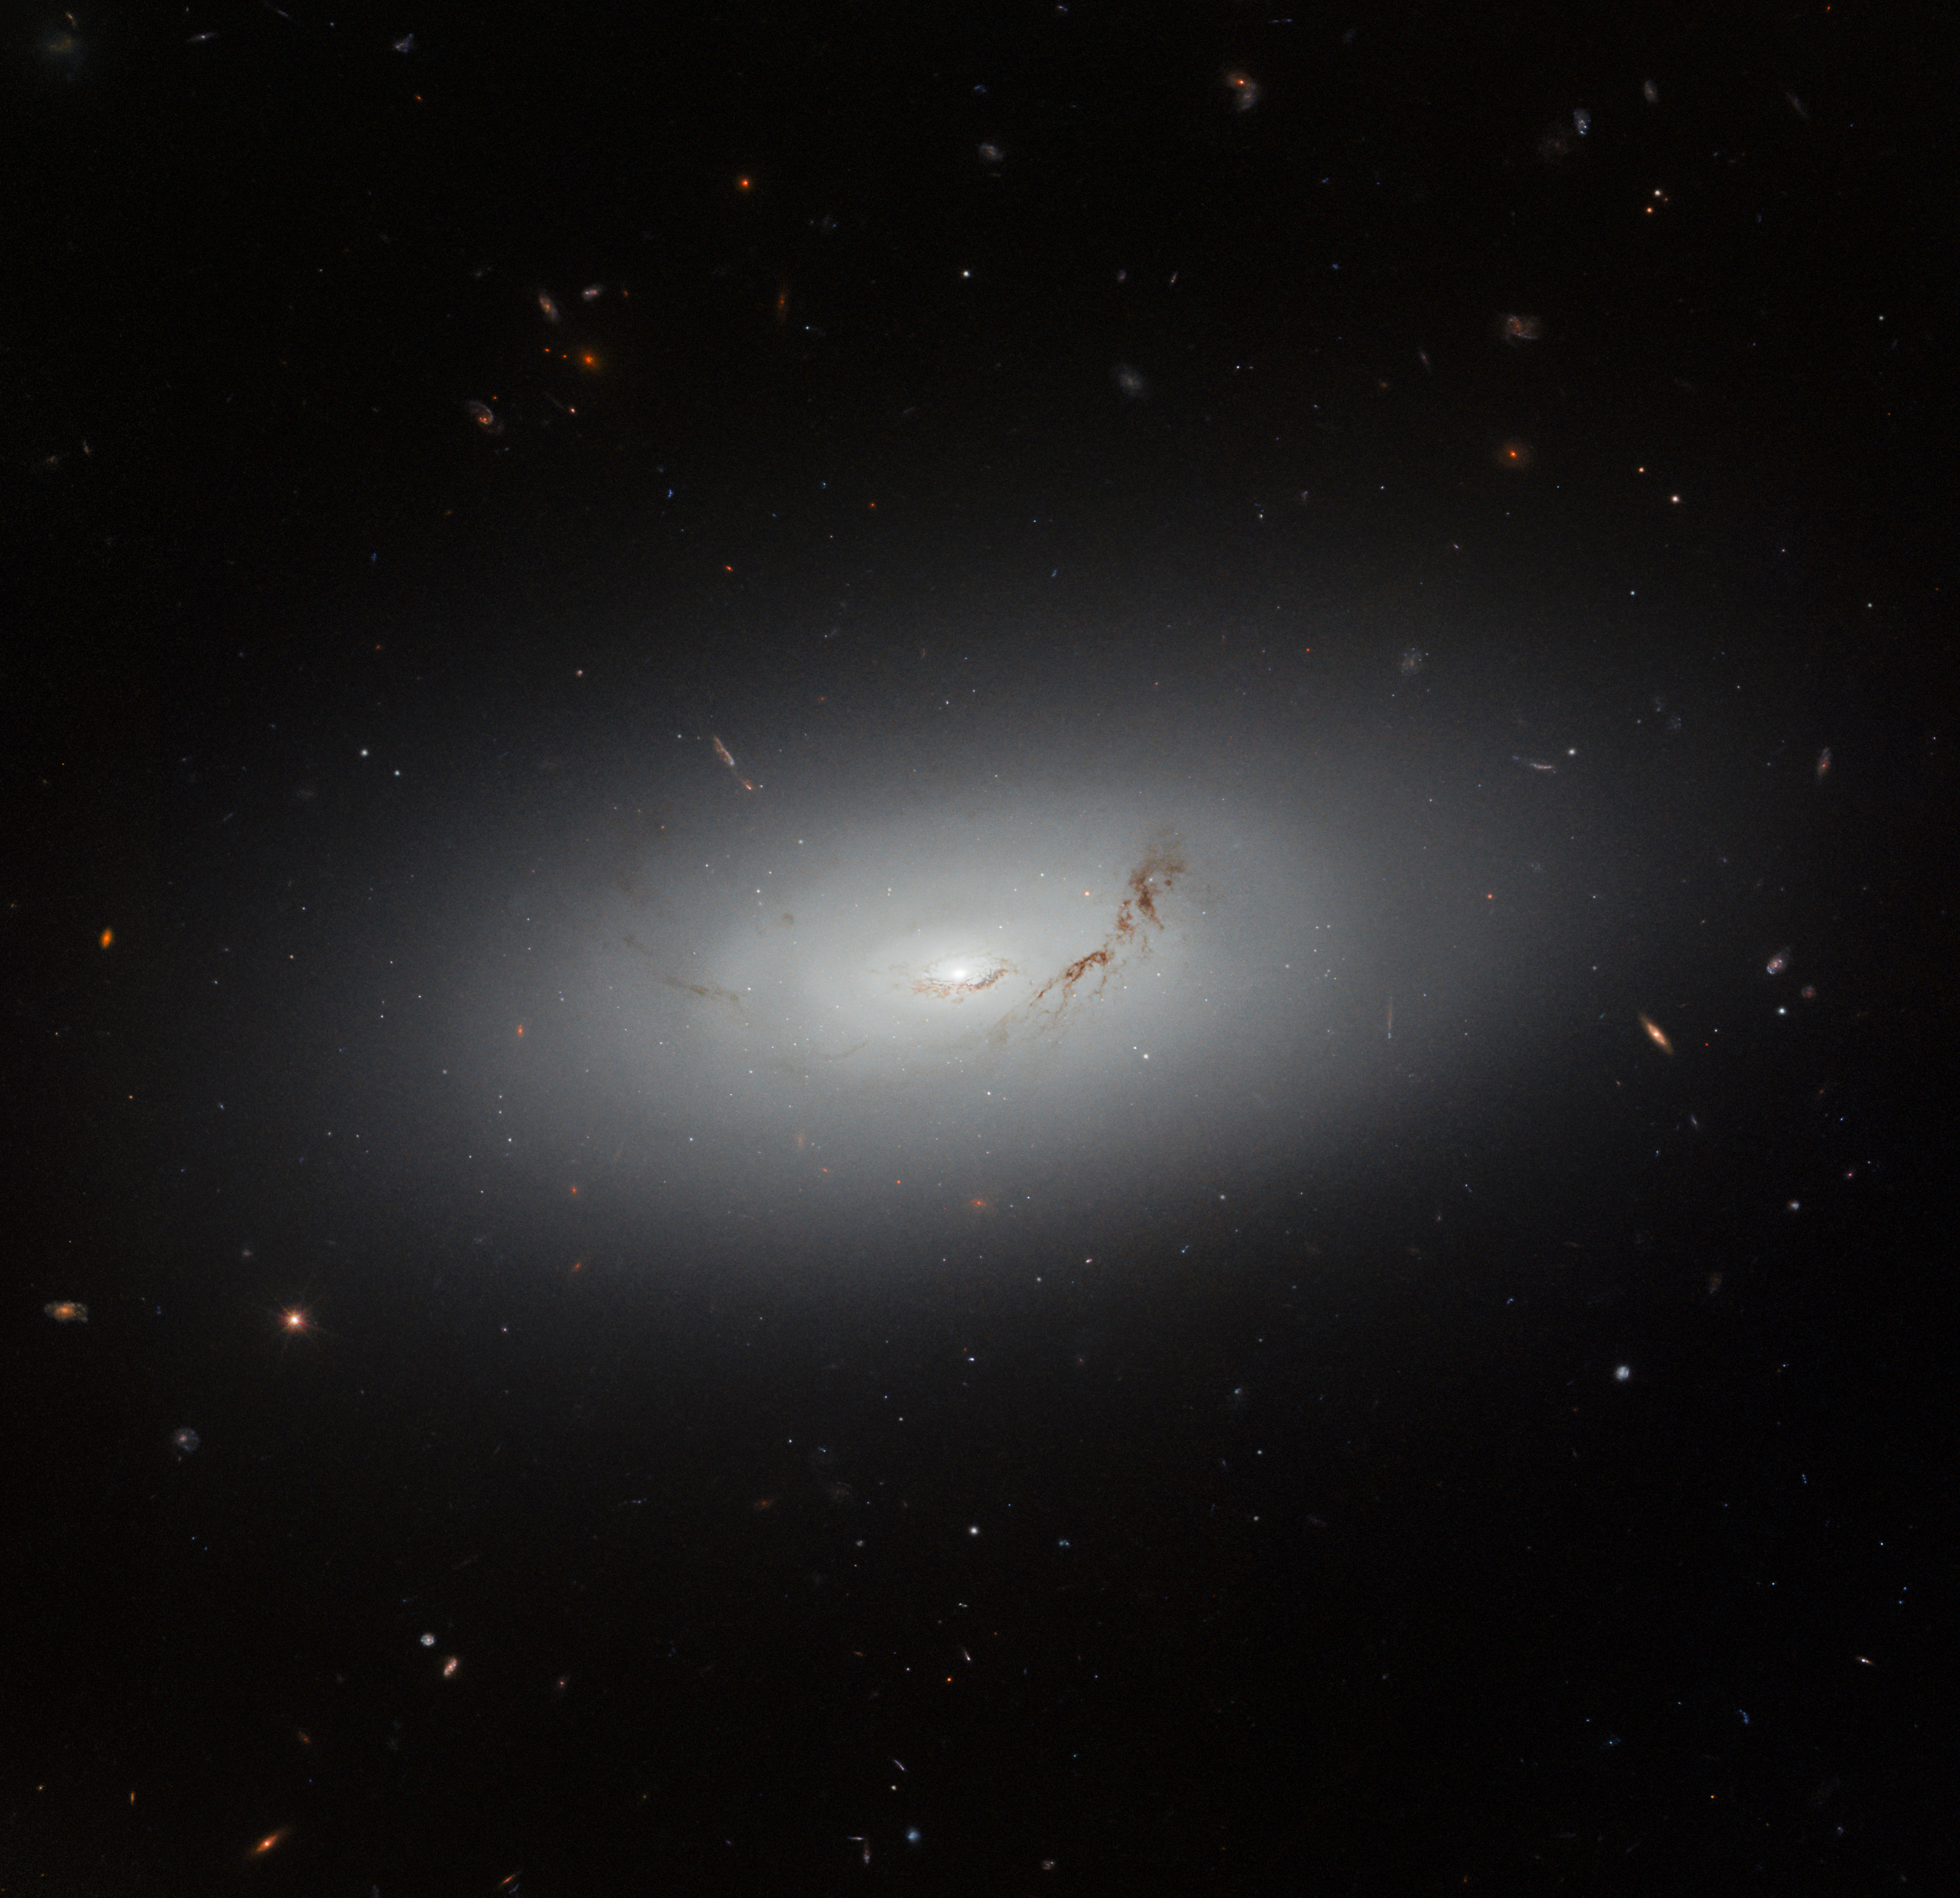

Measure of a great galactic disc

This dream-like Picture of the Week features the galaxy known as NGC 3156. It is a lenticular galaxy, meaning that it falls somewhere between an elliptical and a spiral galaxy. It lies about 73 million light-years from Earth, in the minor equatorial constellation Sextans.

Sextans is a small constellation that belongs to the Hercules family of constellations. It itself is a constellation with an astronomical theme, being named for the instrument known as the sextant. Sextants are often thought of as navigational instruments that were invented in the 18th century. However, the sextant as an astronomical tool has been around for much longer than that: Islamic scholars developed astronomical sextants many hundreds of years earlier in order to measure angles in the sky. A particularly striking example is the enormous sextant with a radius of 36 metres that was developed by Ulugh Beg of the Timurid dynasty in the fifteenth century, located in Samarkand in present-day Uzbekistan. These early sextants may have been a development of the quadrant, a measuring device proposed by Ptolemy. A sextant, as the name suggests, is shaped like one-sixth of a circle, approximately the shape of the constellation.

Sextants are no longer in use in modern astronomy, having been replaced by instruments that are capable of measuring the positions of stars and astronomical objects much more accurately and precisely. NGC 3156 has been studied in many ways other than determining its precise position — from its cohort of globular clusters, to its relatively recent star formation, to the stars that are being destroyed by the supermassive black hole at its centre.

Credit: ESA/Hubble & NASA, R. Sharples, S. Kaviraj, W. Keel